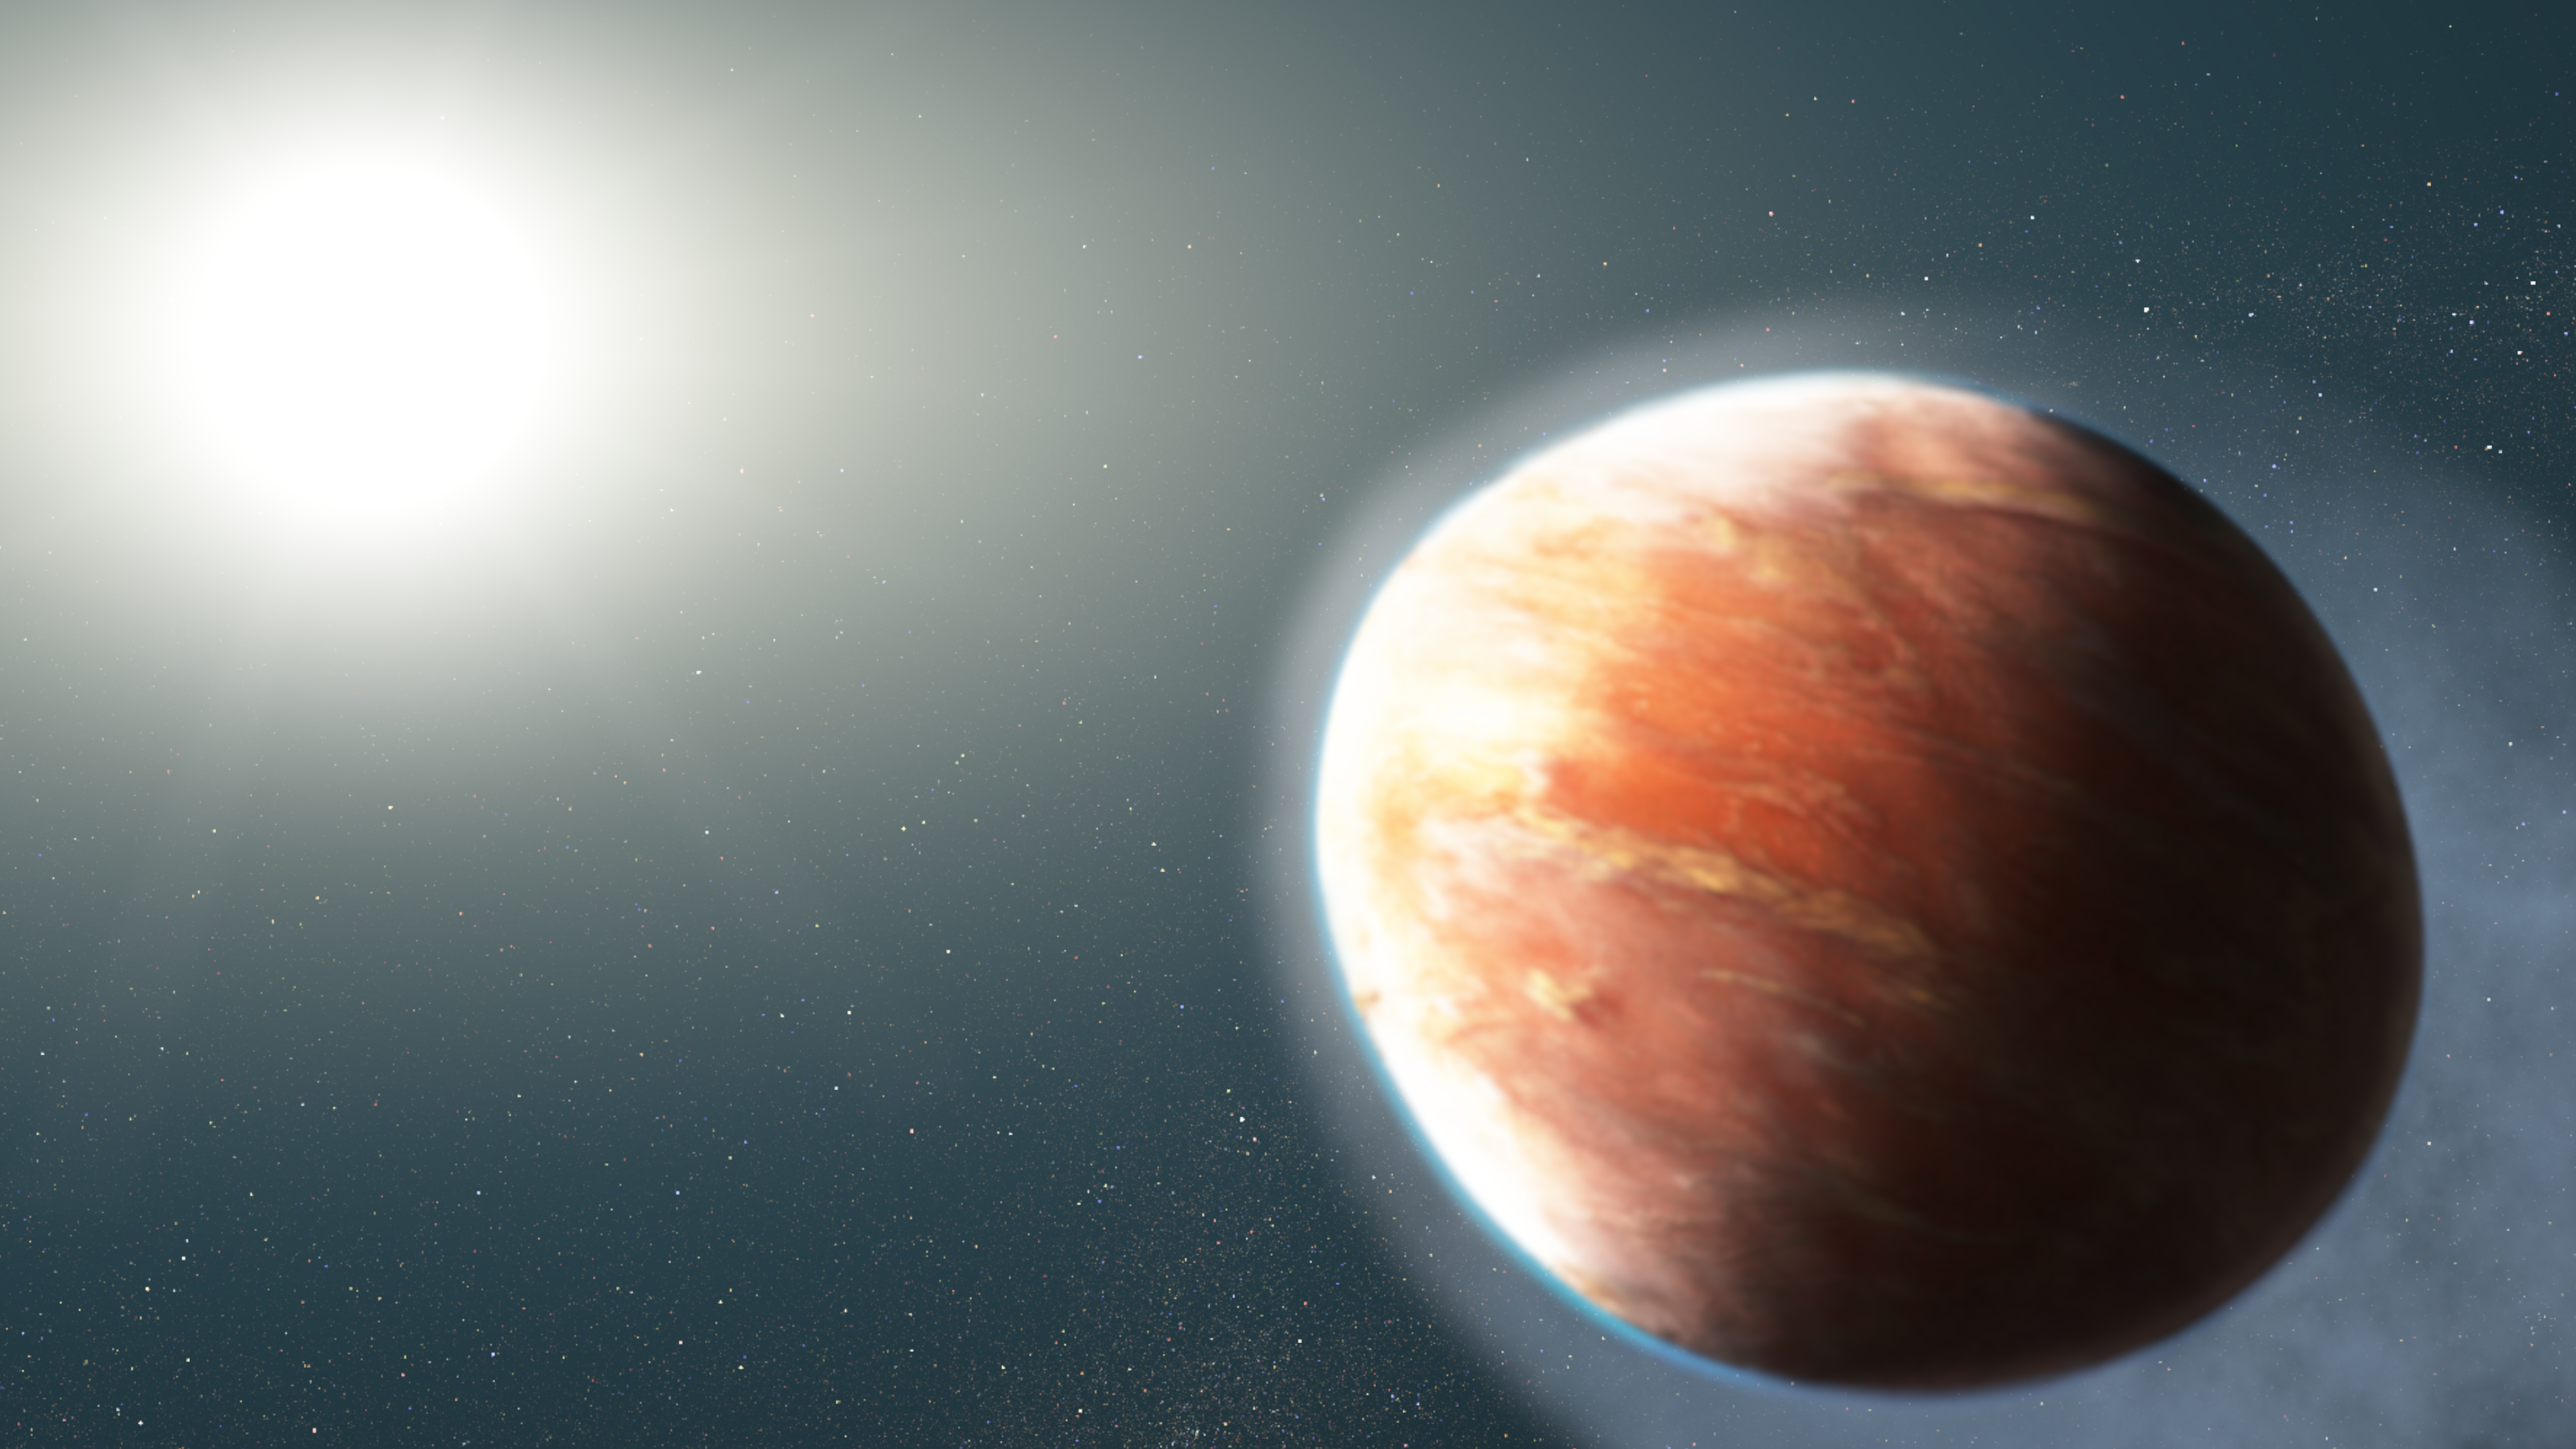

Artist’s Impression of WASP-121b

This artist's illustration shows an alien world that is losing magnesium and iron gas from its atmosphere. The observations represent the first time that so-called "heavy metals" — elements more massive than hydrogen and helium — have been detected escaping from a hot Jupiter, a large gaseous exoplanet orbiting very close to its star.

The planet, known as WASP-121b, orbits a star brighter and hotter than the Sun. The planet is so dangerously close to its star that its upper atmosphere reaches a blazing 4,600 degrees Fahrenheit, about 10 times greater than any known planetary atmosphere. A torrent of ultraviolet light from the host star is heating the planet's upper atmosphere, which is causing the magnesium and iron gas to escape into space. Observations by Hubble's Space Telescope Imaging Spectrograph have detected the spectral signatures of magnesium and iron far away from the planet.

The planet's "hugging" distance from the star means that it is on the verge of being ripped apart by the star's gravitational tidal forces. The powerful gravitational forces have altered the planet's shape so that it appears more football shaped.

The WASP-121 system is about 900 light-years from Earth.

Credit: NASA, ESA, and J. Olmsted (STScI)